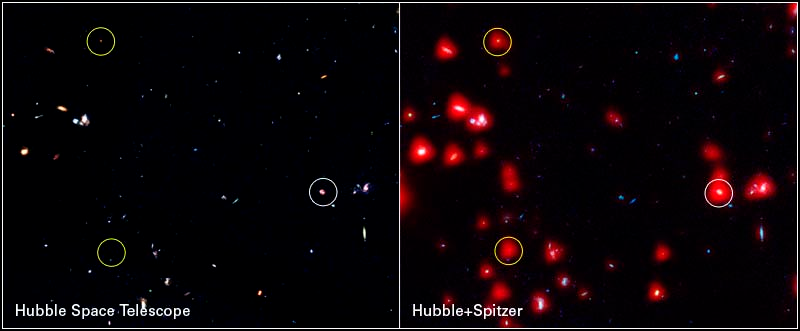

Instrument comparison of 1/200 of the full GOODS fields

(Left) HST ACS image of 1/200 of the full GOODS fields shows three X-ray sources (circled) and many other galaxies. (Right) Combined HST-Spitzer IRAC image of the same region. The two "hard" X-ray sources (yellow circles, indicating sources detected only at the shortest X-ray wavelengths) are very faint in the visible but much more luminous in the infrared, exactly as expected if the accreting black hole is hidden behind a dusty screen.

Credit: NASA, ESA, A. M. Koekemoer (STScI), M. Dickinson (NOAO) and The GOODS Team